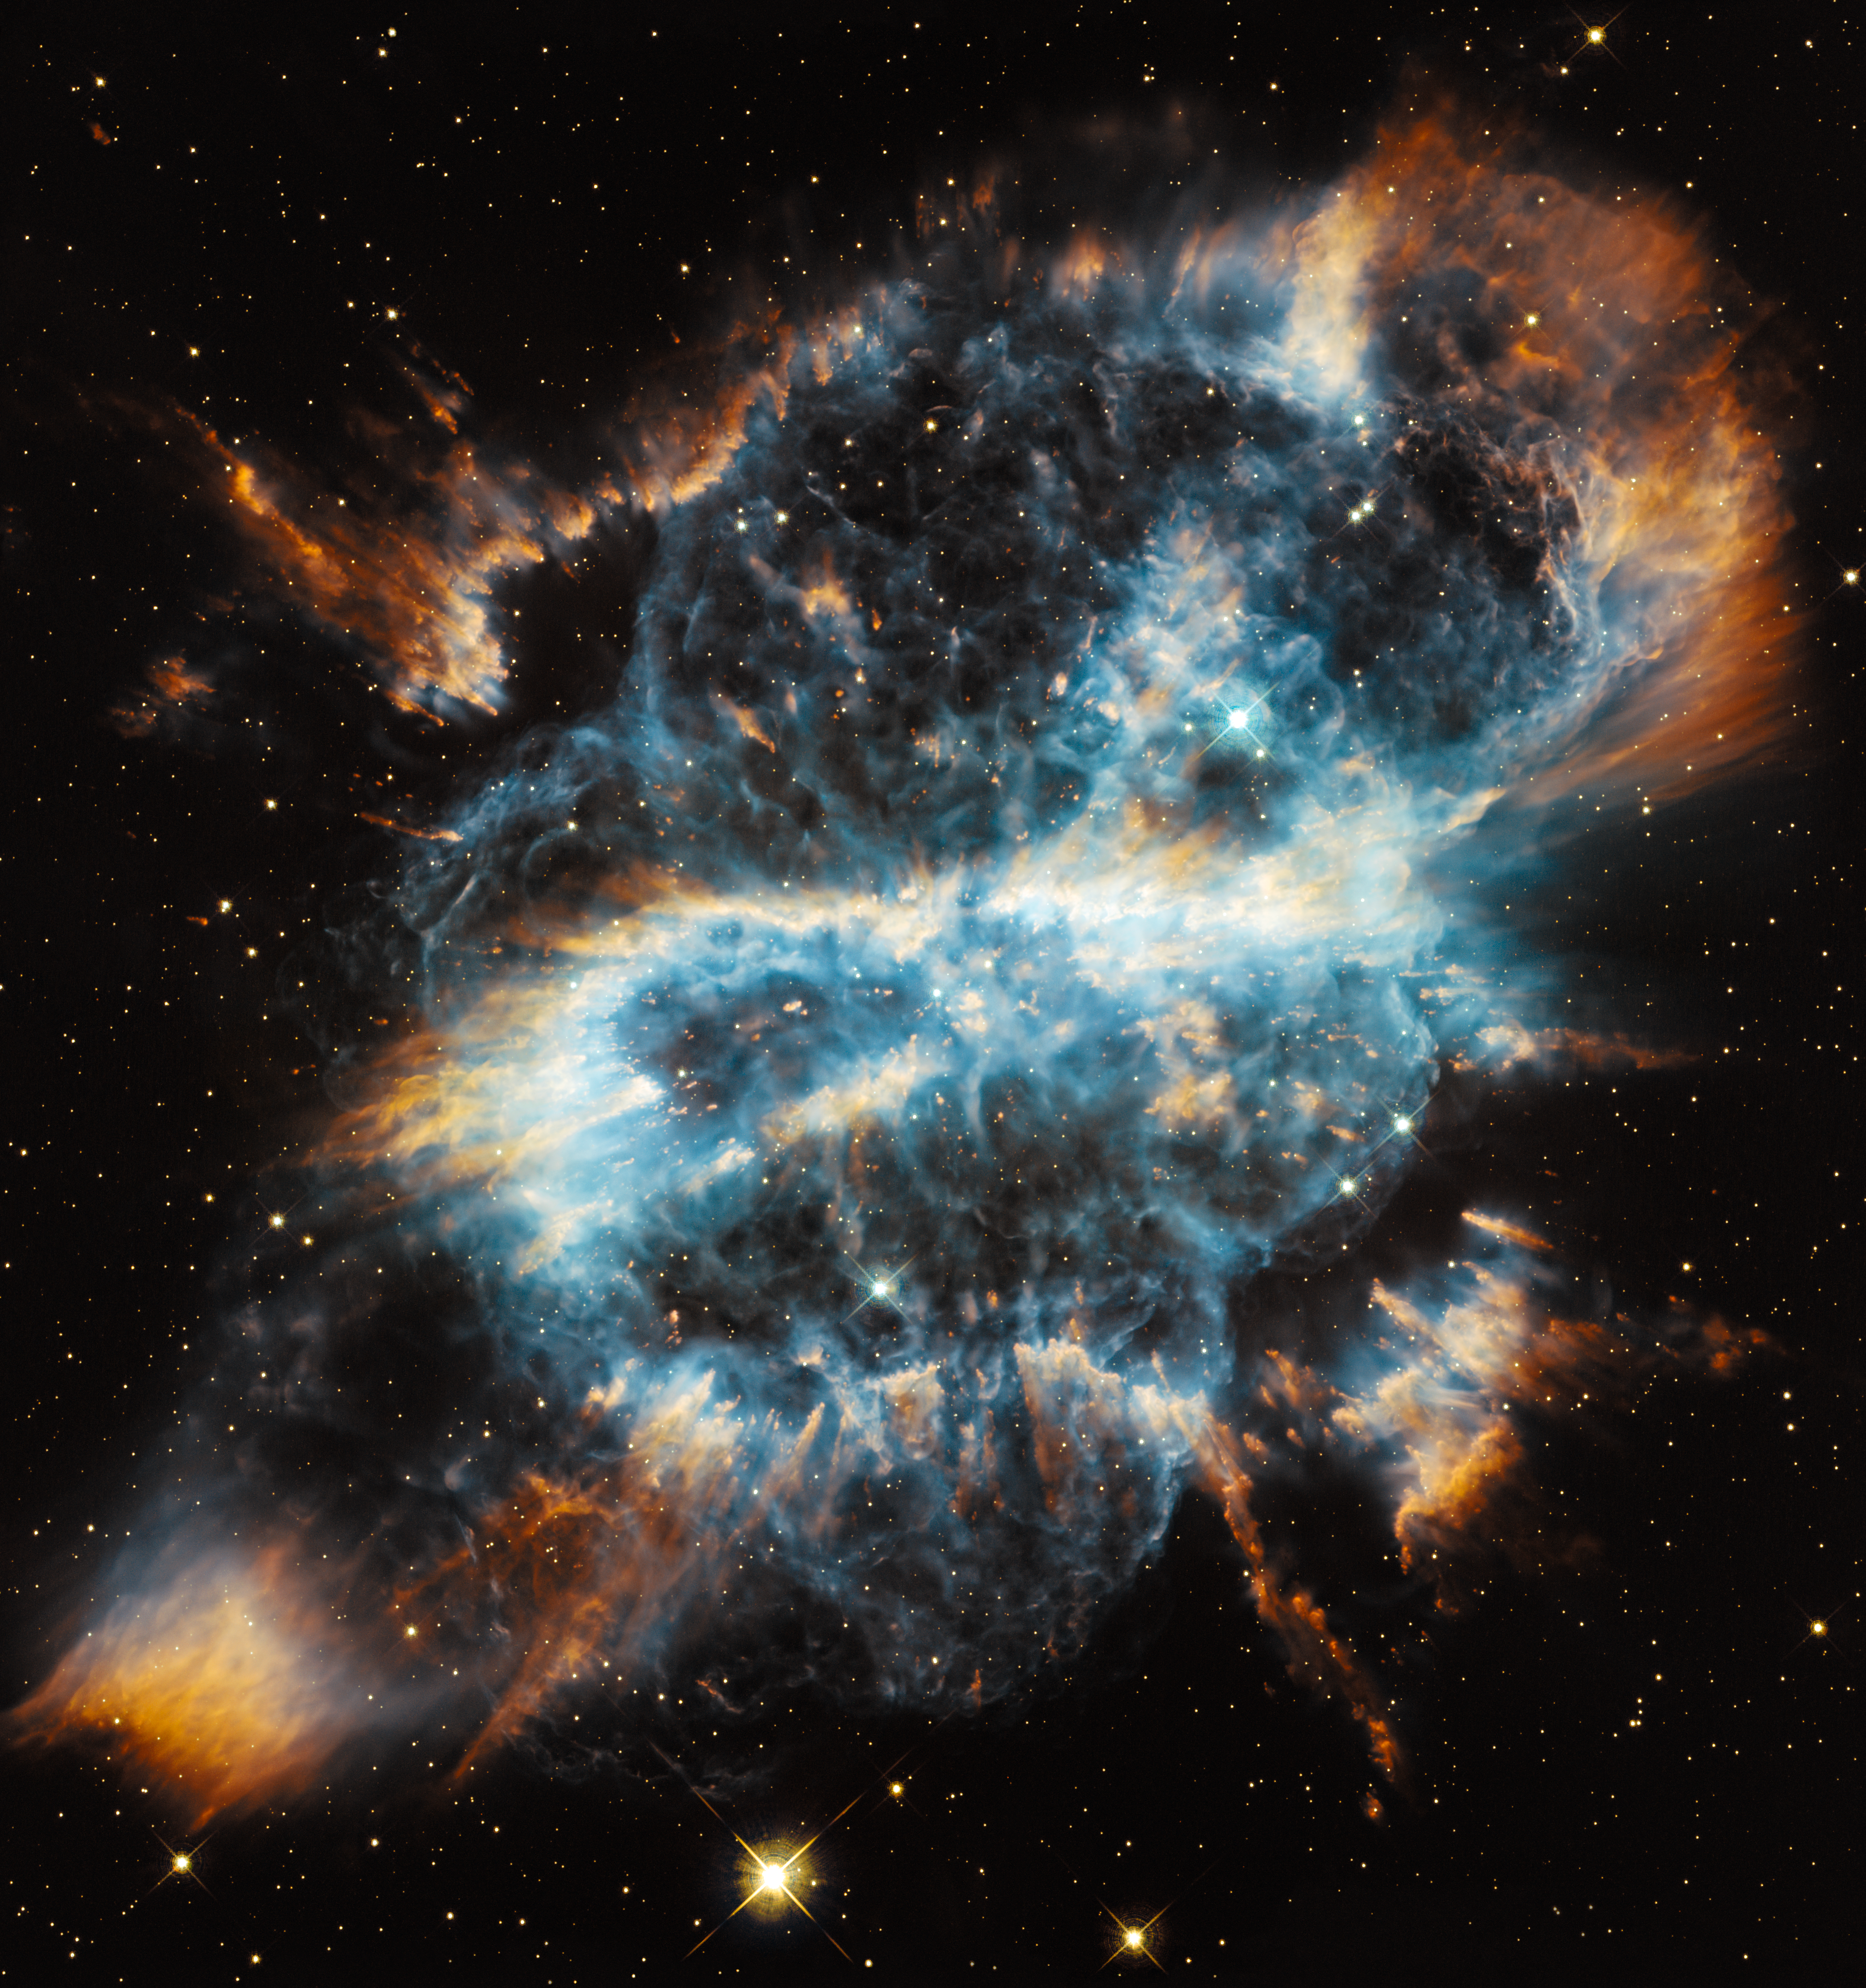

Hubble snaps NGC 5189

The NASA/ESA Hubble Space Telescope celebrates the holiday season with a striking image of the planetary nebula NGC 5189. The intricate structure of the stellar eruption looks like a giant and brightly coloured ribbon in space.

Credit: NASA, ESA and the Hubble Heritage Team (STScI/AURA)